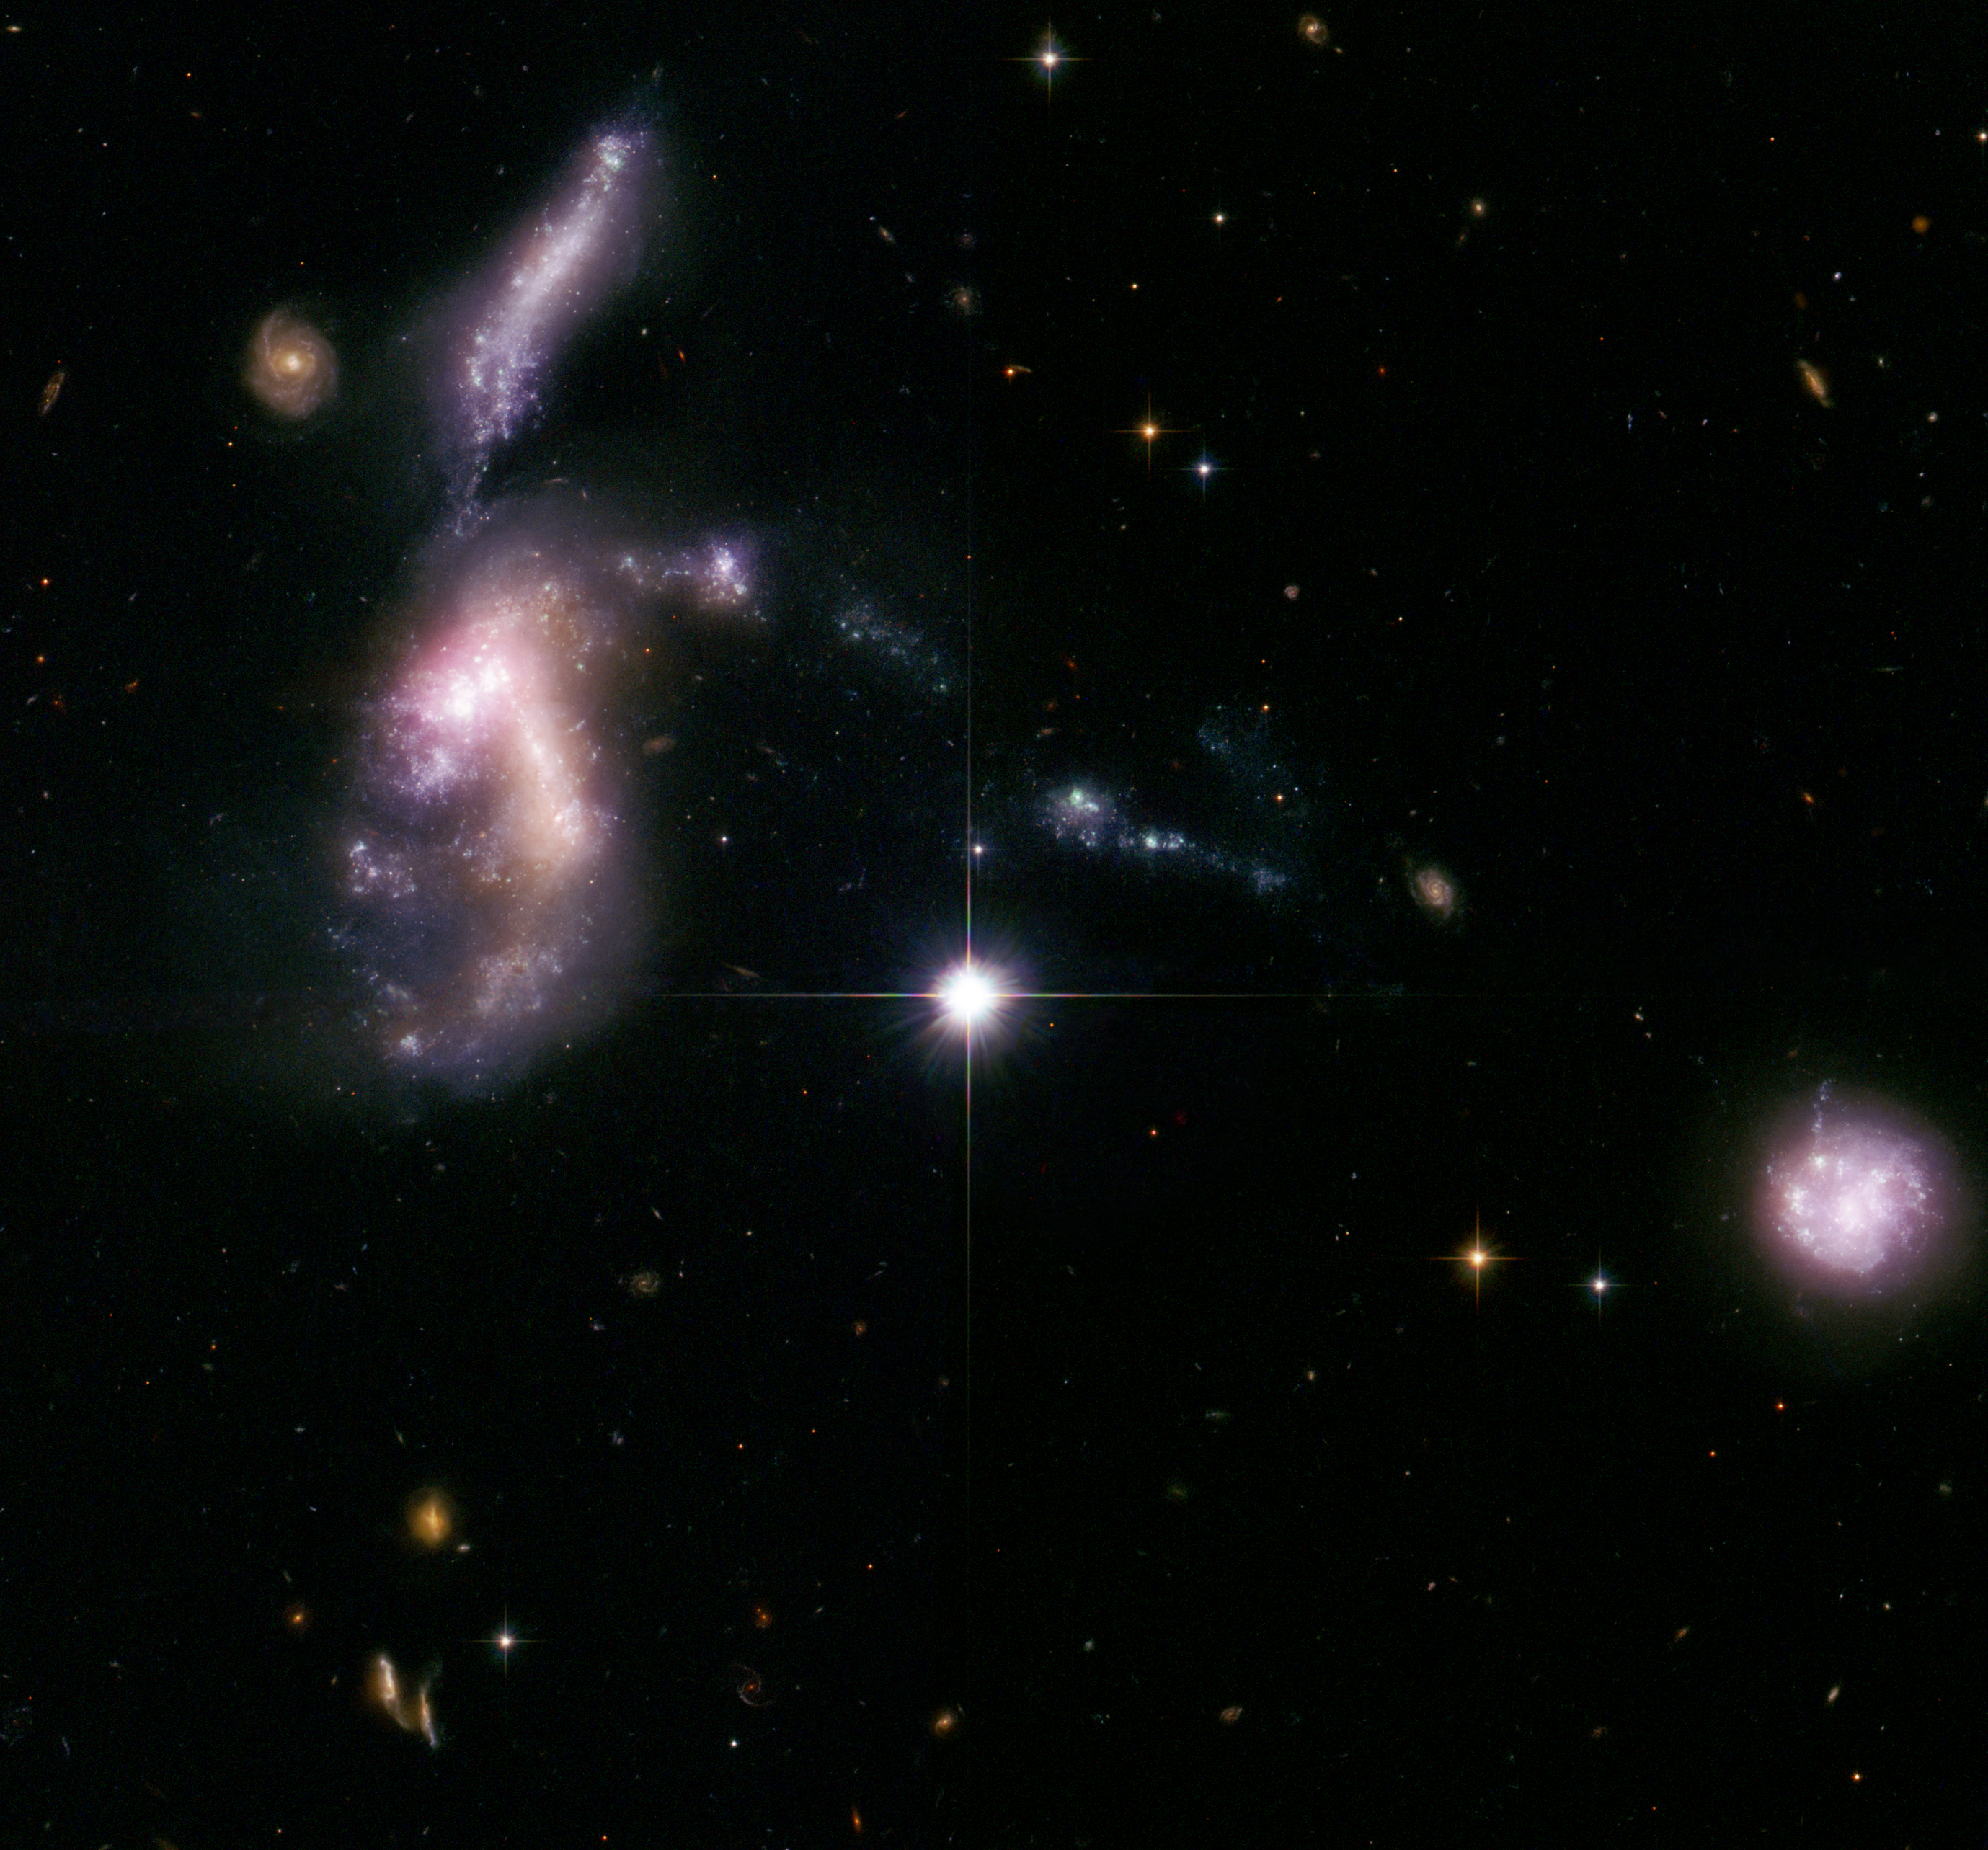

Hickson Compact Group 31: interacting galaxies glow with millions of young stars

These four dwarf galaxies waited billions of years to come together, setting off a fireworks show as thousands of new star clusters come to life. The distorted galaxies are quickly producing massive, hot, young stars that are pumping out ultraviolet radiation, heating up surrounding gas clouds, and causing them to glow.

Such encounters between dwarf galaxies are normally seen billions of light-years away and therefore occurred billions of years ago. But these galaxies, members of Hickson Compact Group 31, are relatively nearby, only 166 million light-years away.

In this composite image of the galaxy grouping, the bright, distorted object at middle, left, is actually two colliding dwarf galaxies. Myriad star clusters have formed in the streamers of debris pulled from the galaxies and at the site of their head-on collision. The cigar-shaped object above the galaxy duo is another member of the group. A bridge of star clusters connects the trio. A long rope of bright star clusters points to the fourth member of the group, at lower right. The bright object in the center is a foreground star. The image was composed from observations made by the Hubble Space Telescope's Advanced Camera for Surveys, NASA's Spitzer Space Telescope, and the Galaxy Evolution Explorer (GALEX).

Astronomers used Hubble's Advanced Camera for Surveys to resolve the youngest and brightest of star clusters, which allowed them to calculate the clusters' ages, map the star-formation history, and determine that the galaxies are starting the final stages of galaxy assembly. Hubble reveals that the brightest clusters, hefty groups each holding at least 100,000 stars, are less than 10 million years old.

Astronomers say the interacting galaxies will form a large elliptical galaxy in another billion years.

The Advanced Camera for Surveys data were taken on 8 August 2006. The principal investigator was Jane Charlton of Pennsylvania State University, University Park (USA).

The Spitzer observations were made on 22 February 2005. The principal investigator was Kelsey Johnson of the University of Virginia and the National Radio Astronomy Observatory, both in Charlottesville (USA).

The GALEX data were taken on 27 December 2004.

Credit: NASA, ESA, S. Gallagher (The University of Western Ontario) and J. English (University of Manitoba)